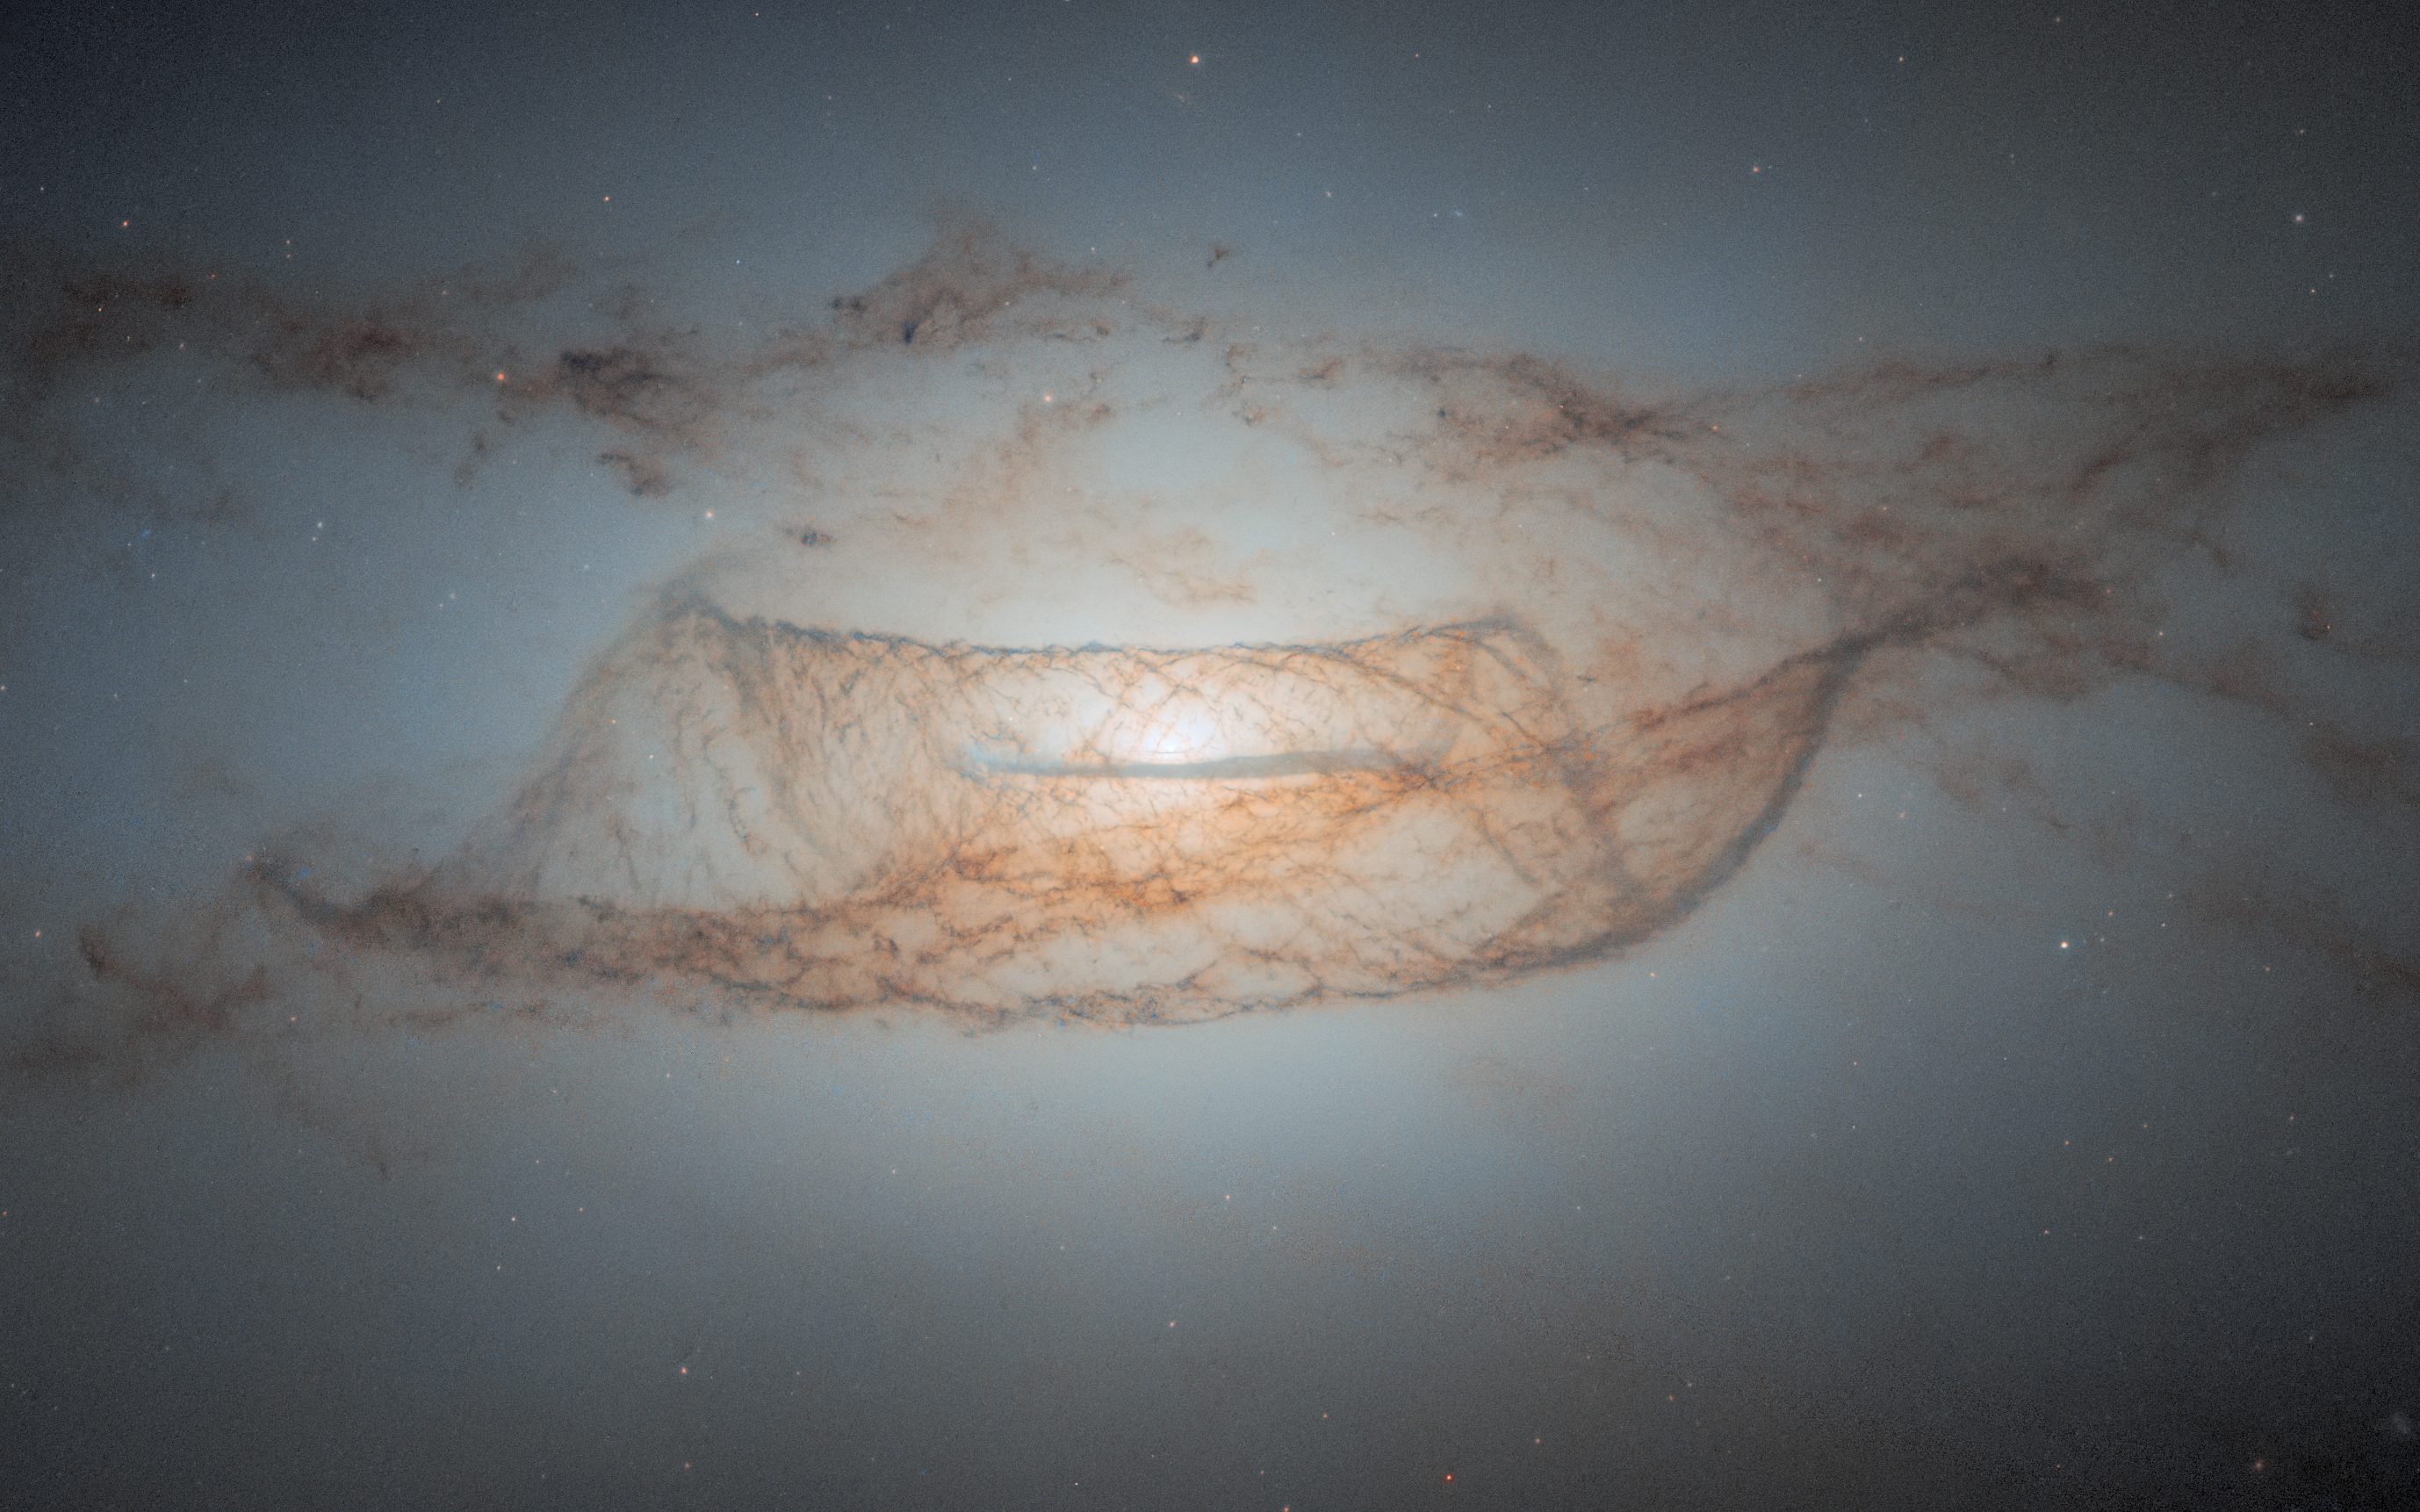

Lenticular dust in detail

Featured in this new image from the NASA/ESA Hubble Space Telescope is a nearly edge-on view of the lenticular galaxy NGC 4753. These galaxies have an elliptical shape and ill-defined spiral arms.

This image is the object's sharpest view to date, showcasing Hubble’s incredible resolving power and ability to reveal complex dust structures. NGC 4753 resides around 60 million light-years from Earth in the constellation Virgo and was first discovered by the astronomer William Herschel in 1784. It is a member of the NGC 4753 Group of galaxies within the Virgo II Cloud, which comprises roughly 100 galaxies and galaxy clusters.

This galaxy is believed to be the result of a galactic merger with a nearby dwarf galaxy roughly 1.3 billion years ago. NGC 4753’s distinct dust lanes around its nucleus are believed to have been accreted from this merger event.

It is now believed that most of the mass in the galaxy lies in a slightly flattened spherical halo of dark matter. Dark matter is a form of matter that cannot currently be observed directly, but is thought to comprise about 85% of all matter in the Universe. It is referred to as ‘dark’ because it does not appear to interact with the electromagnetic field, and therefore does not seem to emit, reflect or refract light.

This object is also of scientific interest to test different theories of formation of lenticular galaxies, given its low-density environment and complex structure. Furthermore, this galaxy has been host to two known Type Ia supernovae. These types of supernovae are extremely important as they are all caused by exploding white dwarfs which have companion stars, and always peak at the same brightness — 5 billion times brighter than the Sun. Knowing the true brightness of these events, and comparing this with their apparent brightness, gives astronomers a unique chance to measure distances in the Universe.

Credit: ESA/Hubble & NASA, L. Kelsey